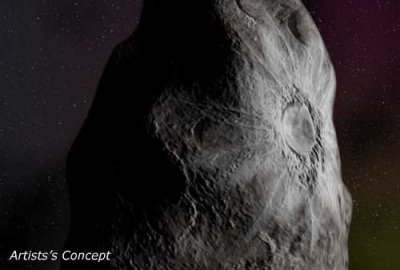

Centaur's bright surface spot could be crater of fresh ice (artist's impression)

This is an artist's impression of object called 8405 Asbolus, a 48-mile-wide (80-kilometer) chunk of ice and dust that lies between Saturn and Uranus. Astronomers using NASA/ESA Hubble Space Telescope were surprised to find that one side of the object (also called a Centaur) looks like it has a fresh crater less than 10 million years old, exposing bright underlying ice Hubble didn't directly see the crater - the object is too small and far away - but a measure of its surface composition shows a complex chemistry. The event that caused the impact crater on 8405 Asbolus may also have knocked it out of the Kuiper belt, a ring of comet nuclei just beyond Pluto's orbit.

Credit: Greg Bacon (STScI/AVL)